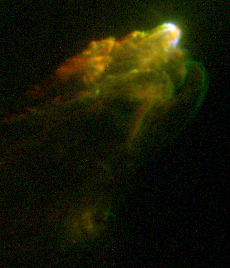

Jet from Young Star

This arrowhead structure is a classic bowshock pattern produced when high-speed material encounters a slower-speed medium. Young stellar jets were discovered 20 years ago, in part due to visible-light observations of bright patches of nebulosity (called Herbig-Haro objects), which appear to be moving away from associated protostars.

Credit: J. Hester (Arizona State University), the WFPC 2 Investigation Definition Team, and NASA/ESA